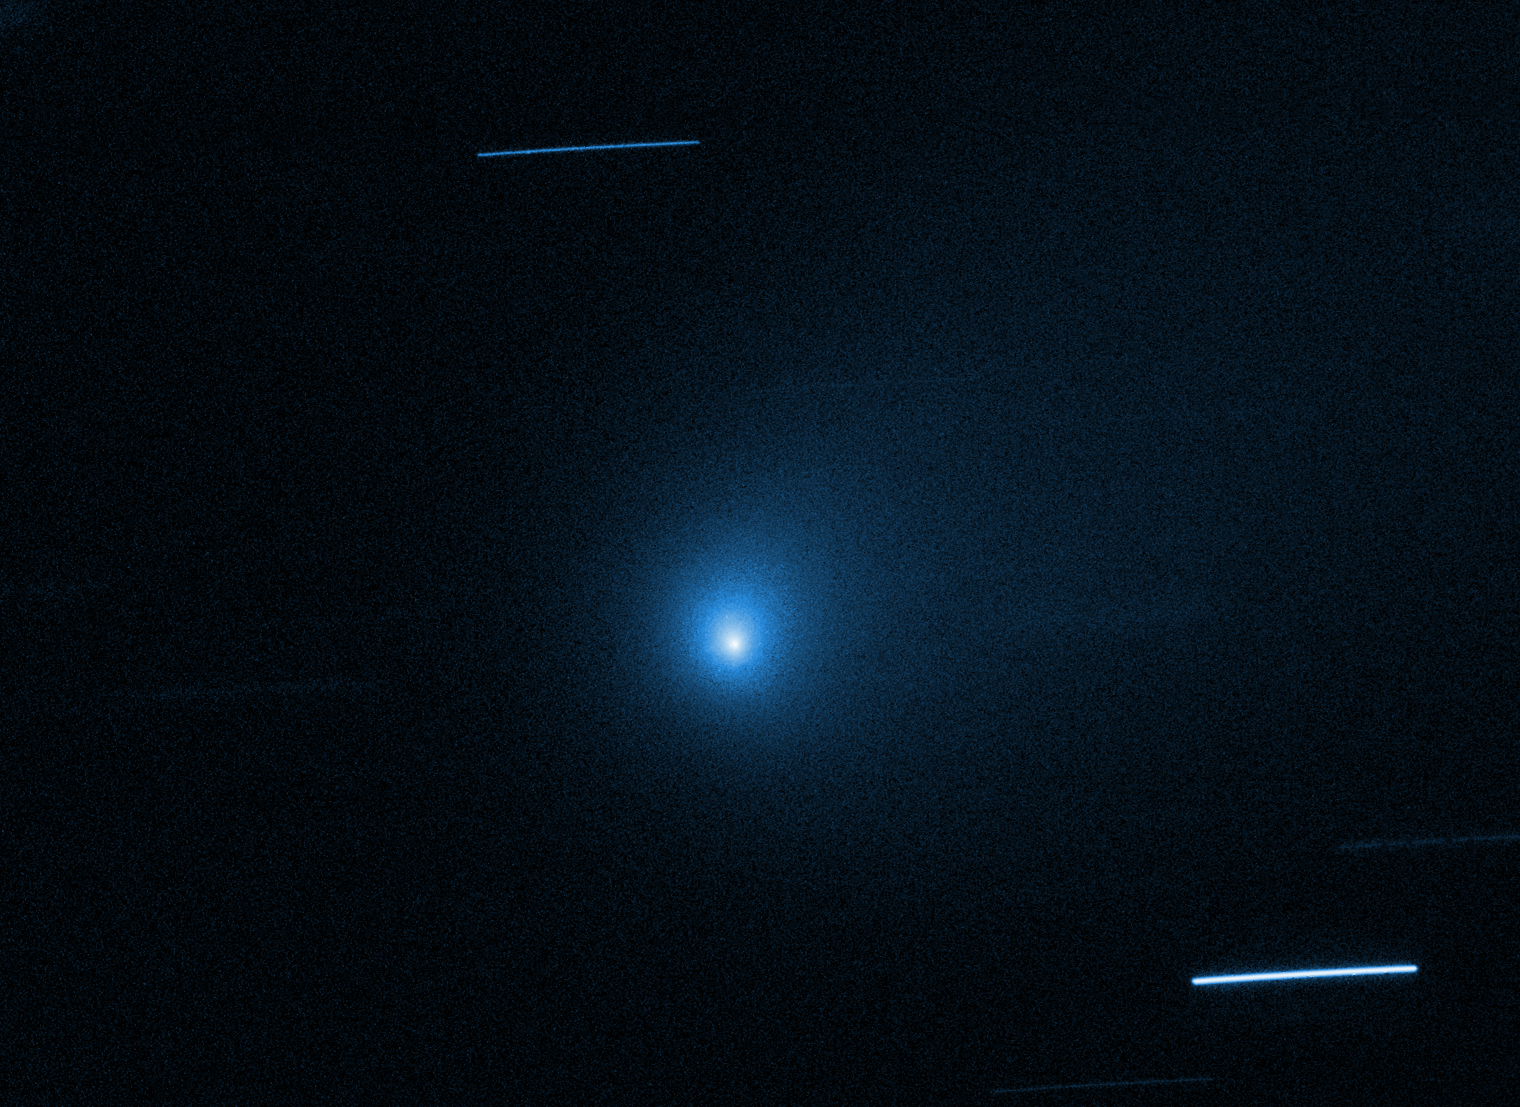

Carbon Monoxide Abundance Points to Comet's Birth Around Cooler Star

The NASA/ESA Hubble Space Telescope has once again observed the interstellar comet 2I/Borisov. New data offers chemical clues to the composition of an object born around another star. Comets are made of gas, ice, and dust that are part of a planet's building blocks.

Borisov's unusual abundance of carbon monoxide, as deduced through Hubble ultraviolet spectroscopic observations, is largely unlike comets belonging to our solar system. Researchers say this abundance points to the comet originating from a circumstellar disk around a class of star called a cool red dwarf.

Credit: NASA, ESA, K. Meech (University of Hawaii), and D. Jewitt (UCLA)